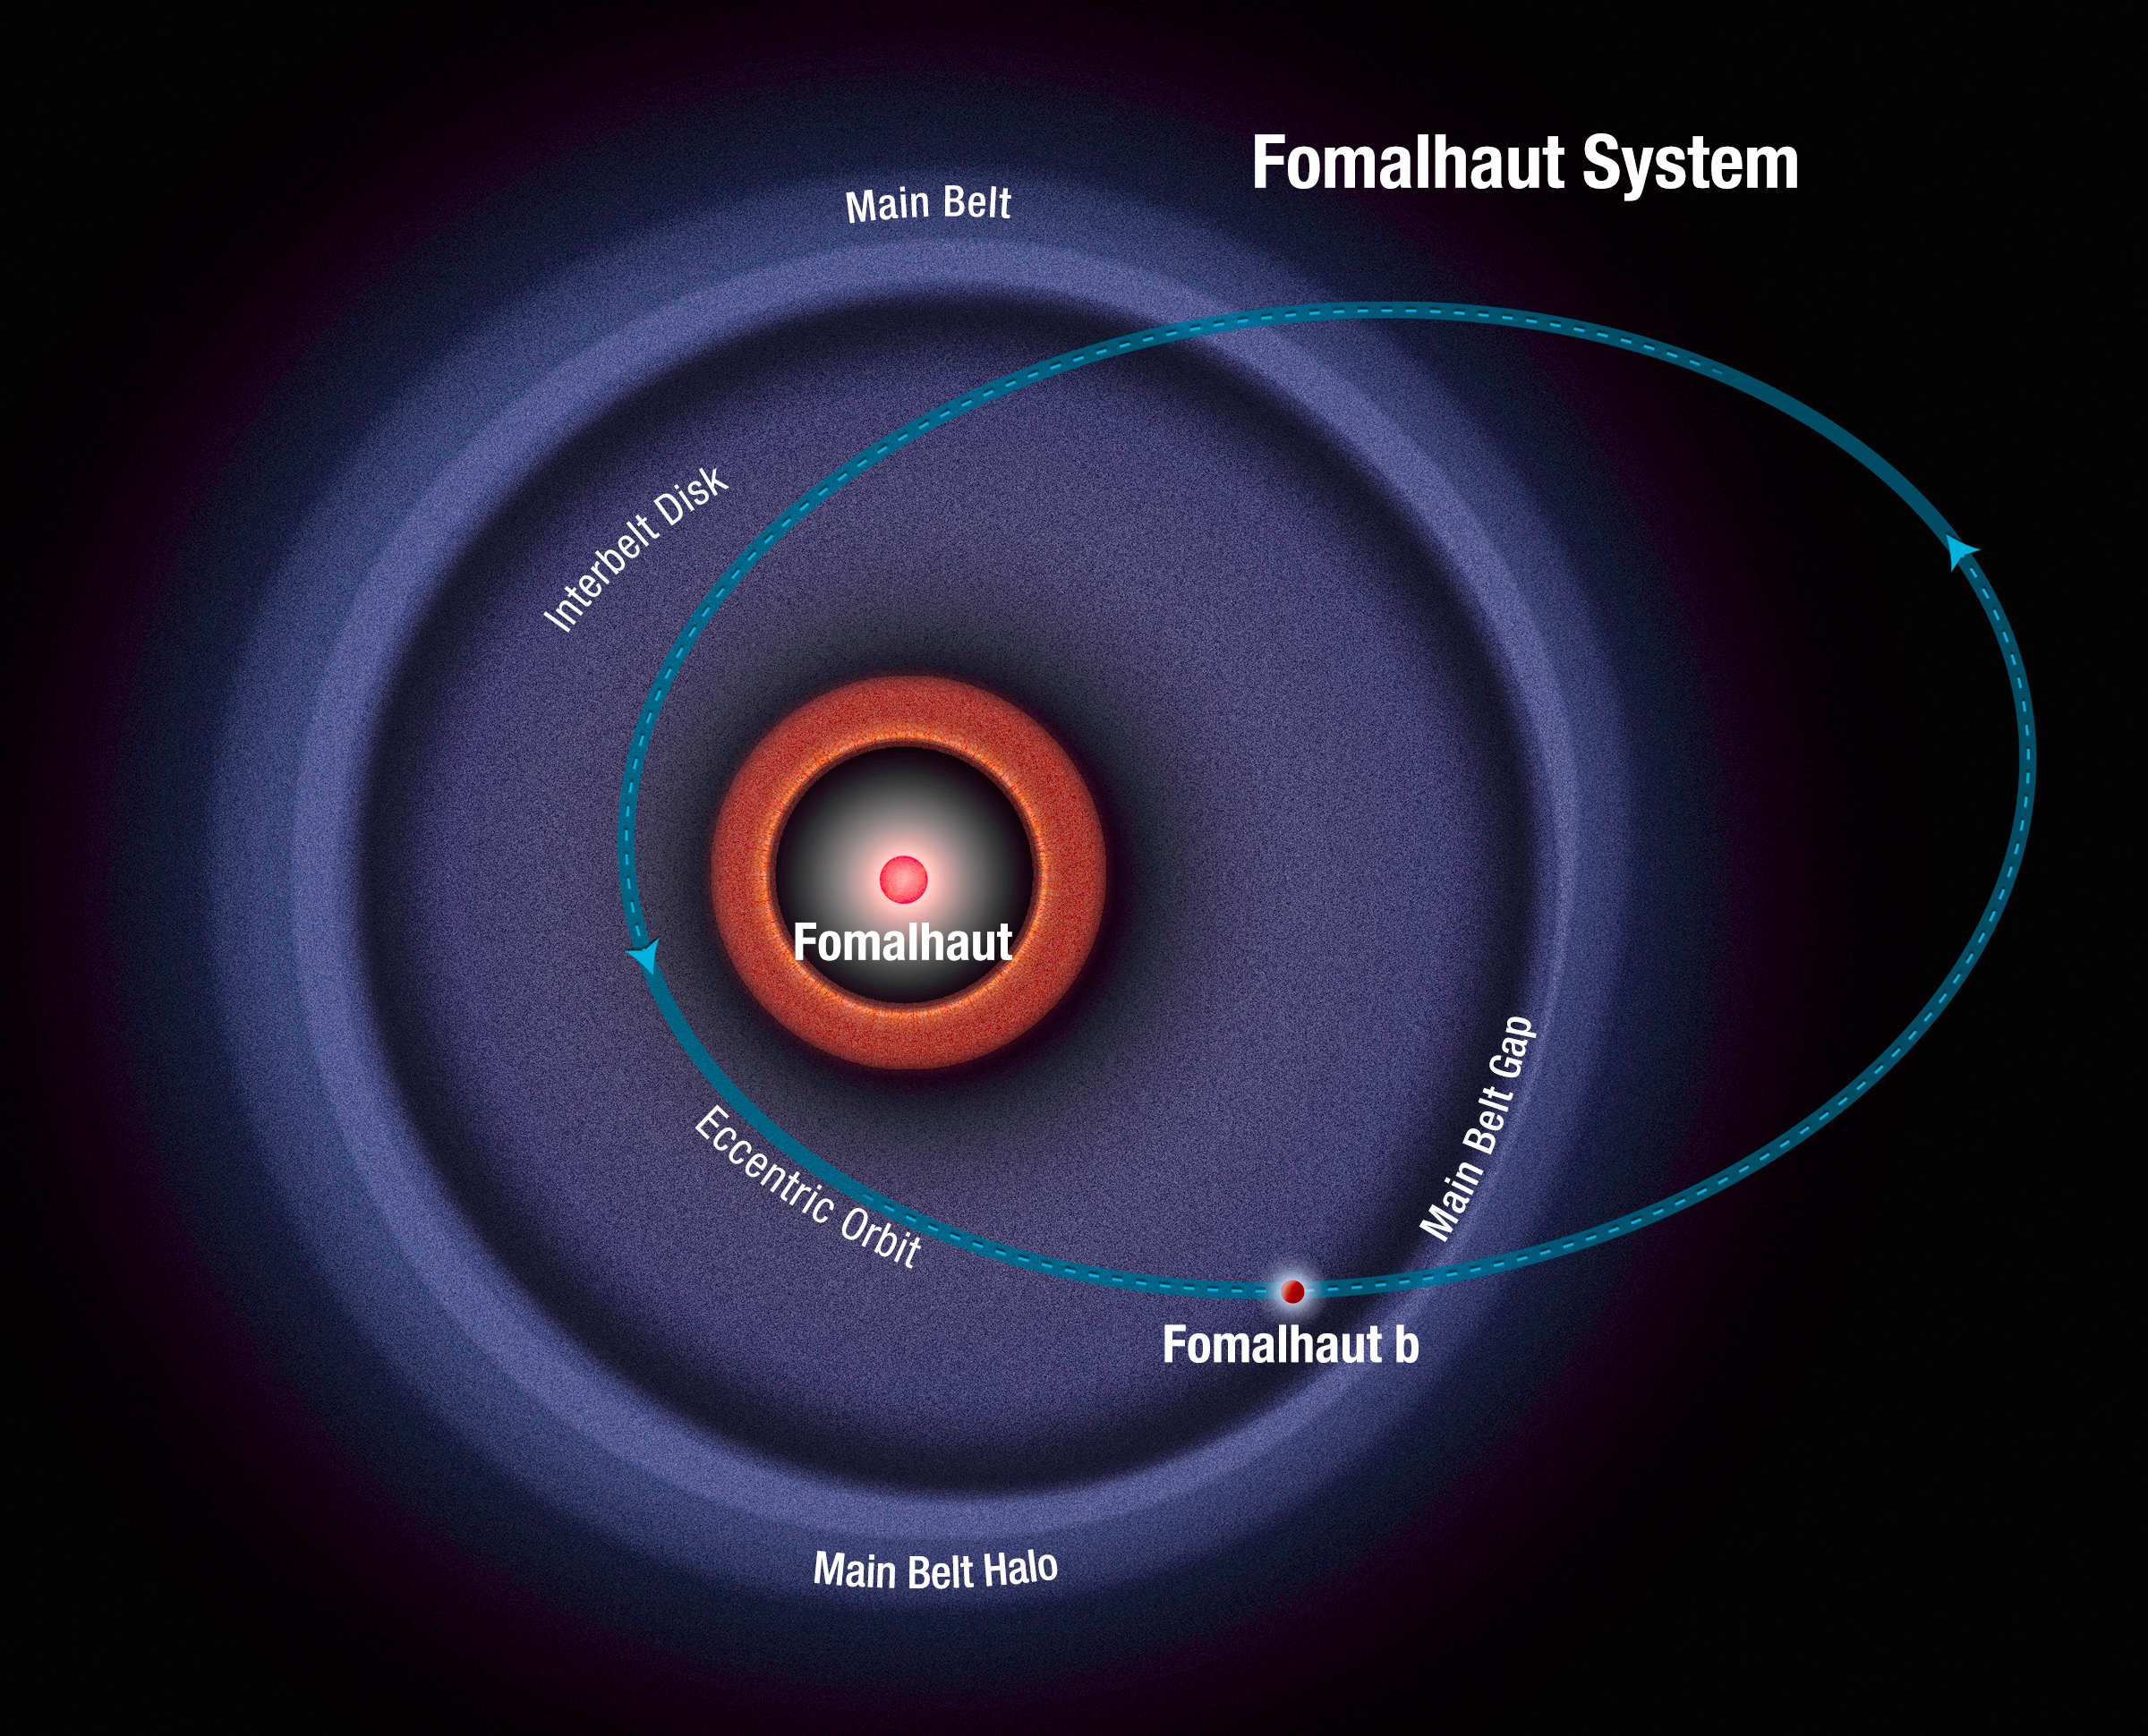

Schematic of Fomalhaut system

This diagram shows the orbit of the exoplanet Fomalhaut b as calculated from recent Hubble Space Telescope observations. The planet follows a highly elliptical orbit that carries it across a wide belt of debris encircling the bright star Fomalhaut. The planet swings as close to its star as 7.4 billion kilometres, and the outermost point of its orbit is 43 billion kilometres away from the star. The orbital period is approximately 2000 years.

Credit: NASA, ESA and A. Feild (STScI). Science Credit: NASA, ESA and P. Kalas (University of California, Berkeley, USA)